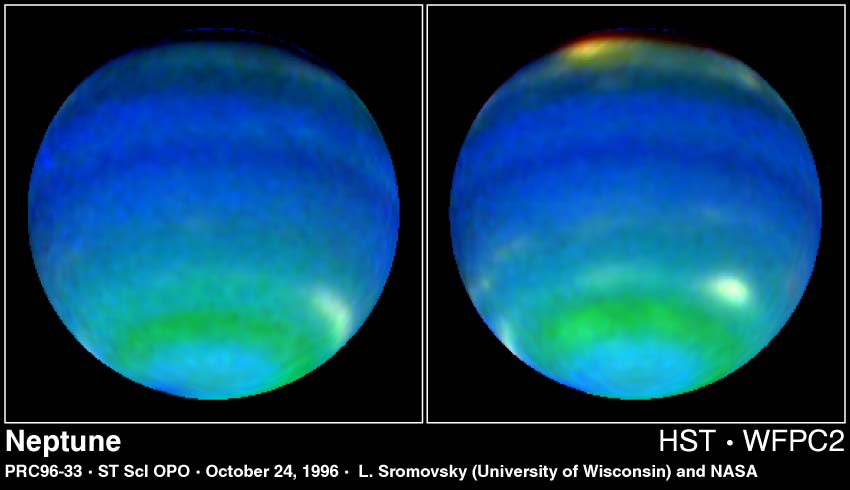

Neptune in Primary Colours

These two Hubble Space Telescope images provide views of weather on opposite hemispheres of Neptune.

Taken Aug. 13, 1996, with Hubble's Wide Field Planetary Camera 2, these composite images blend information from different wavelengths to bring out features of Neptune's blustery weather.

Credit: Lawrence Sromovsky (University of Wisconsin-Madison), NASA/ESA